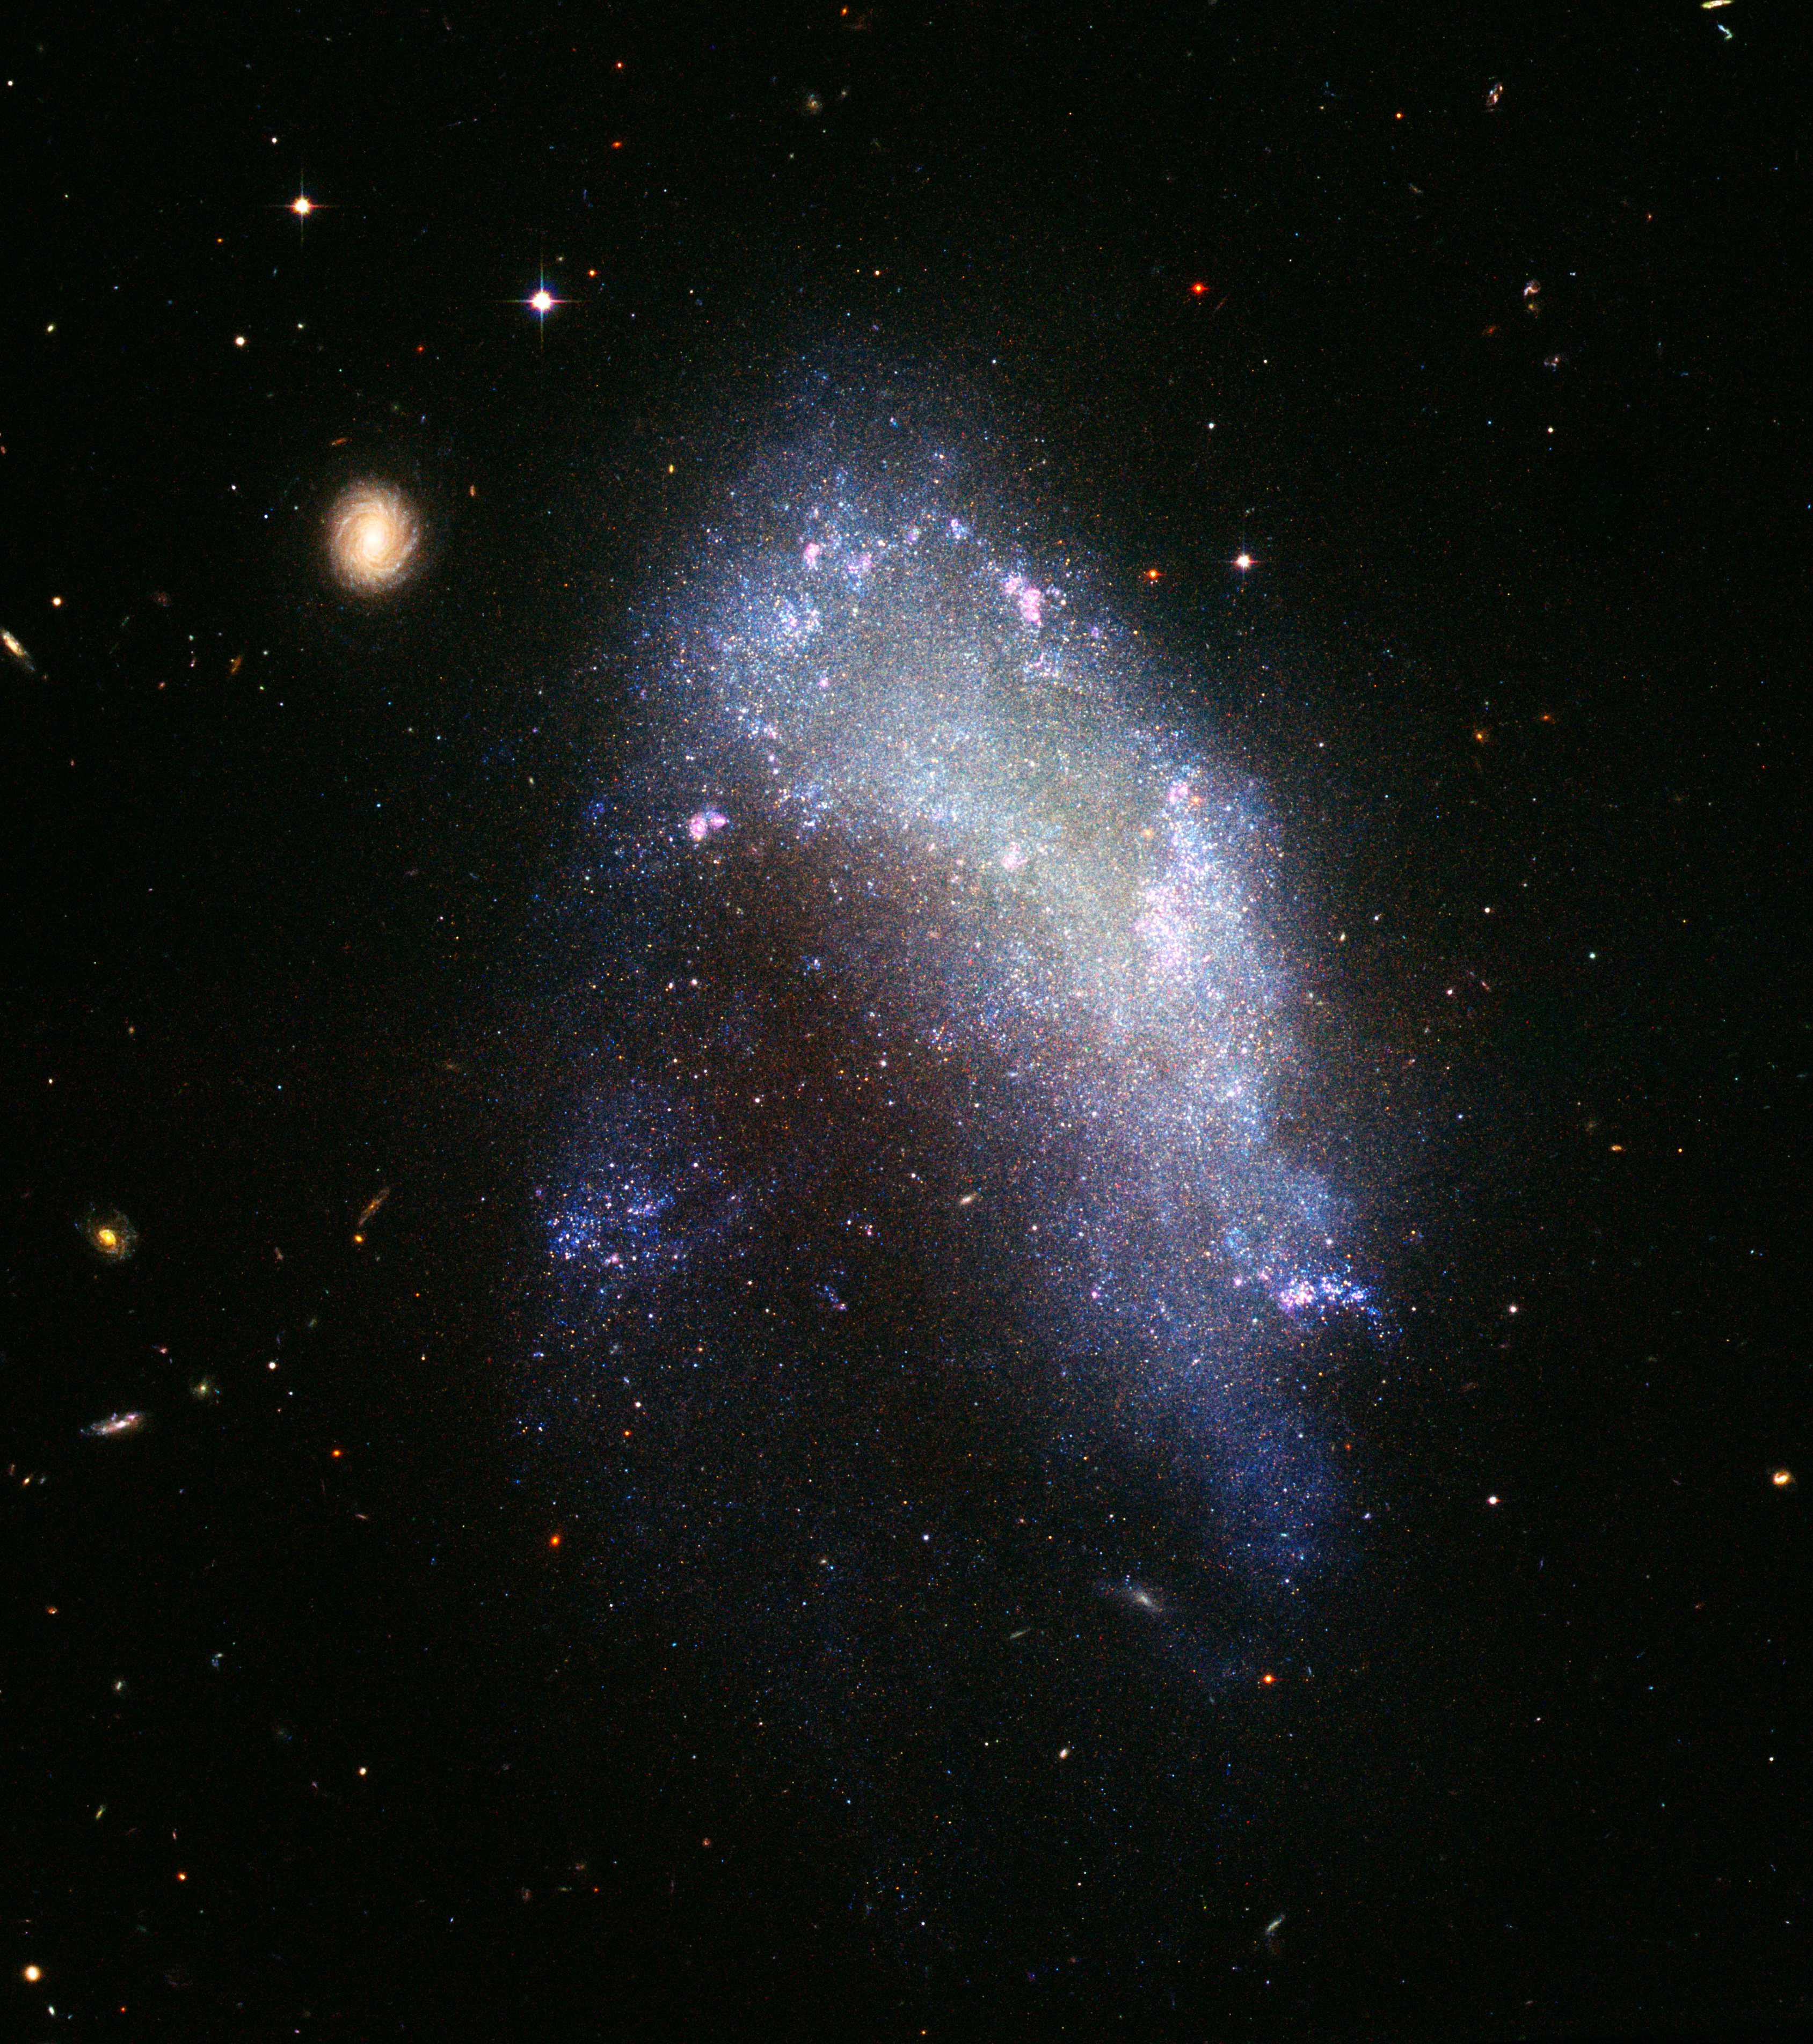

The impending destruction of NGC 1427A

What happens when a galaxy falls in with the wrong crowd? The irregular galaxy NGC 1427A is a spectacular example of the resulting stellar rumble. Under the gravitational grasp of a large gang of galaxies, called the Fornax cluster, the small bluish galaxy is plunging headlong into the group at 600 kilometers per second or nearly 400 miles per second.

Credit: NASA, ESA, and The Hubble Heritage Team STScI/AURA)